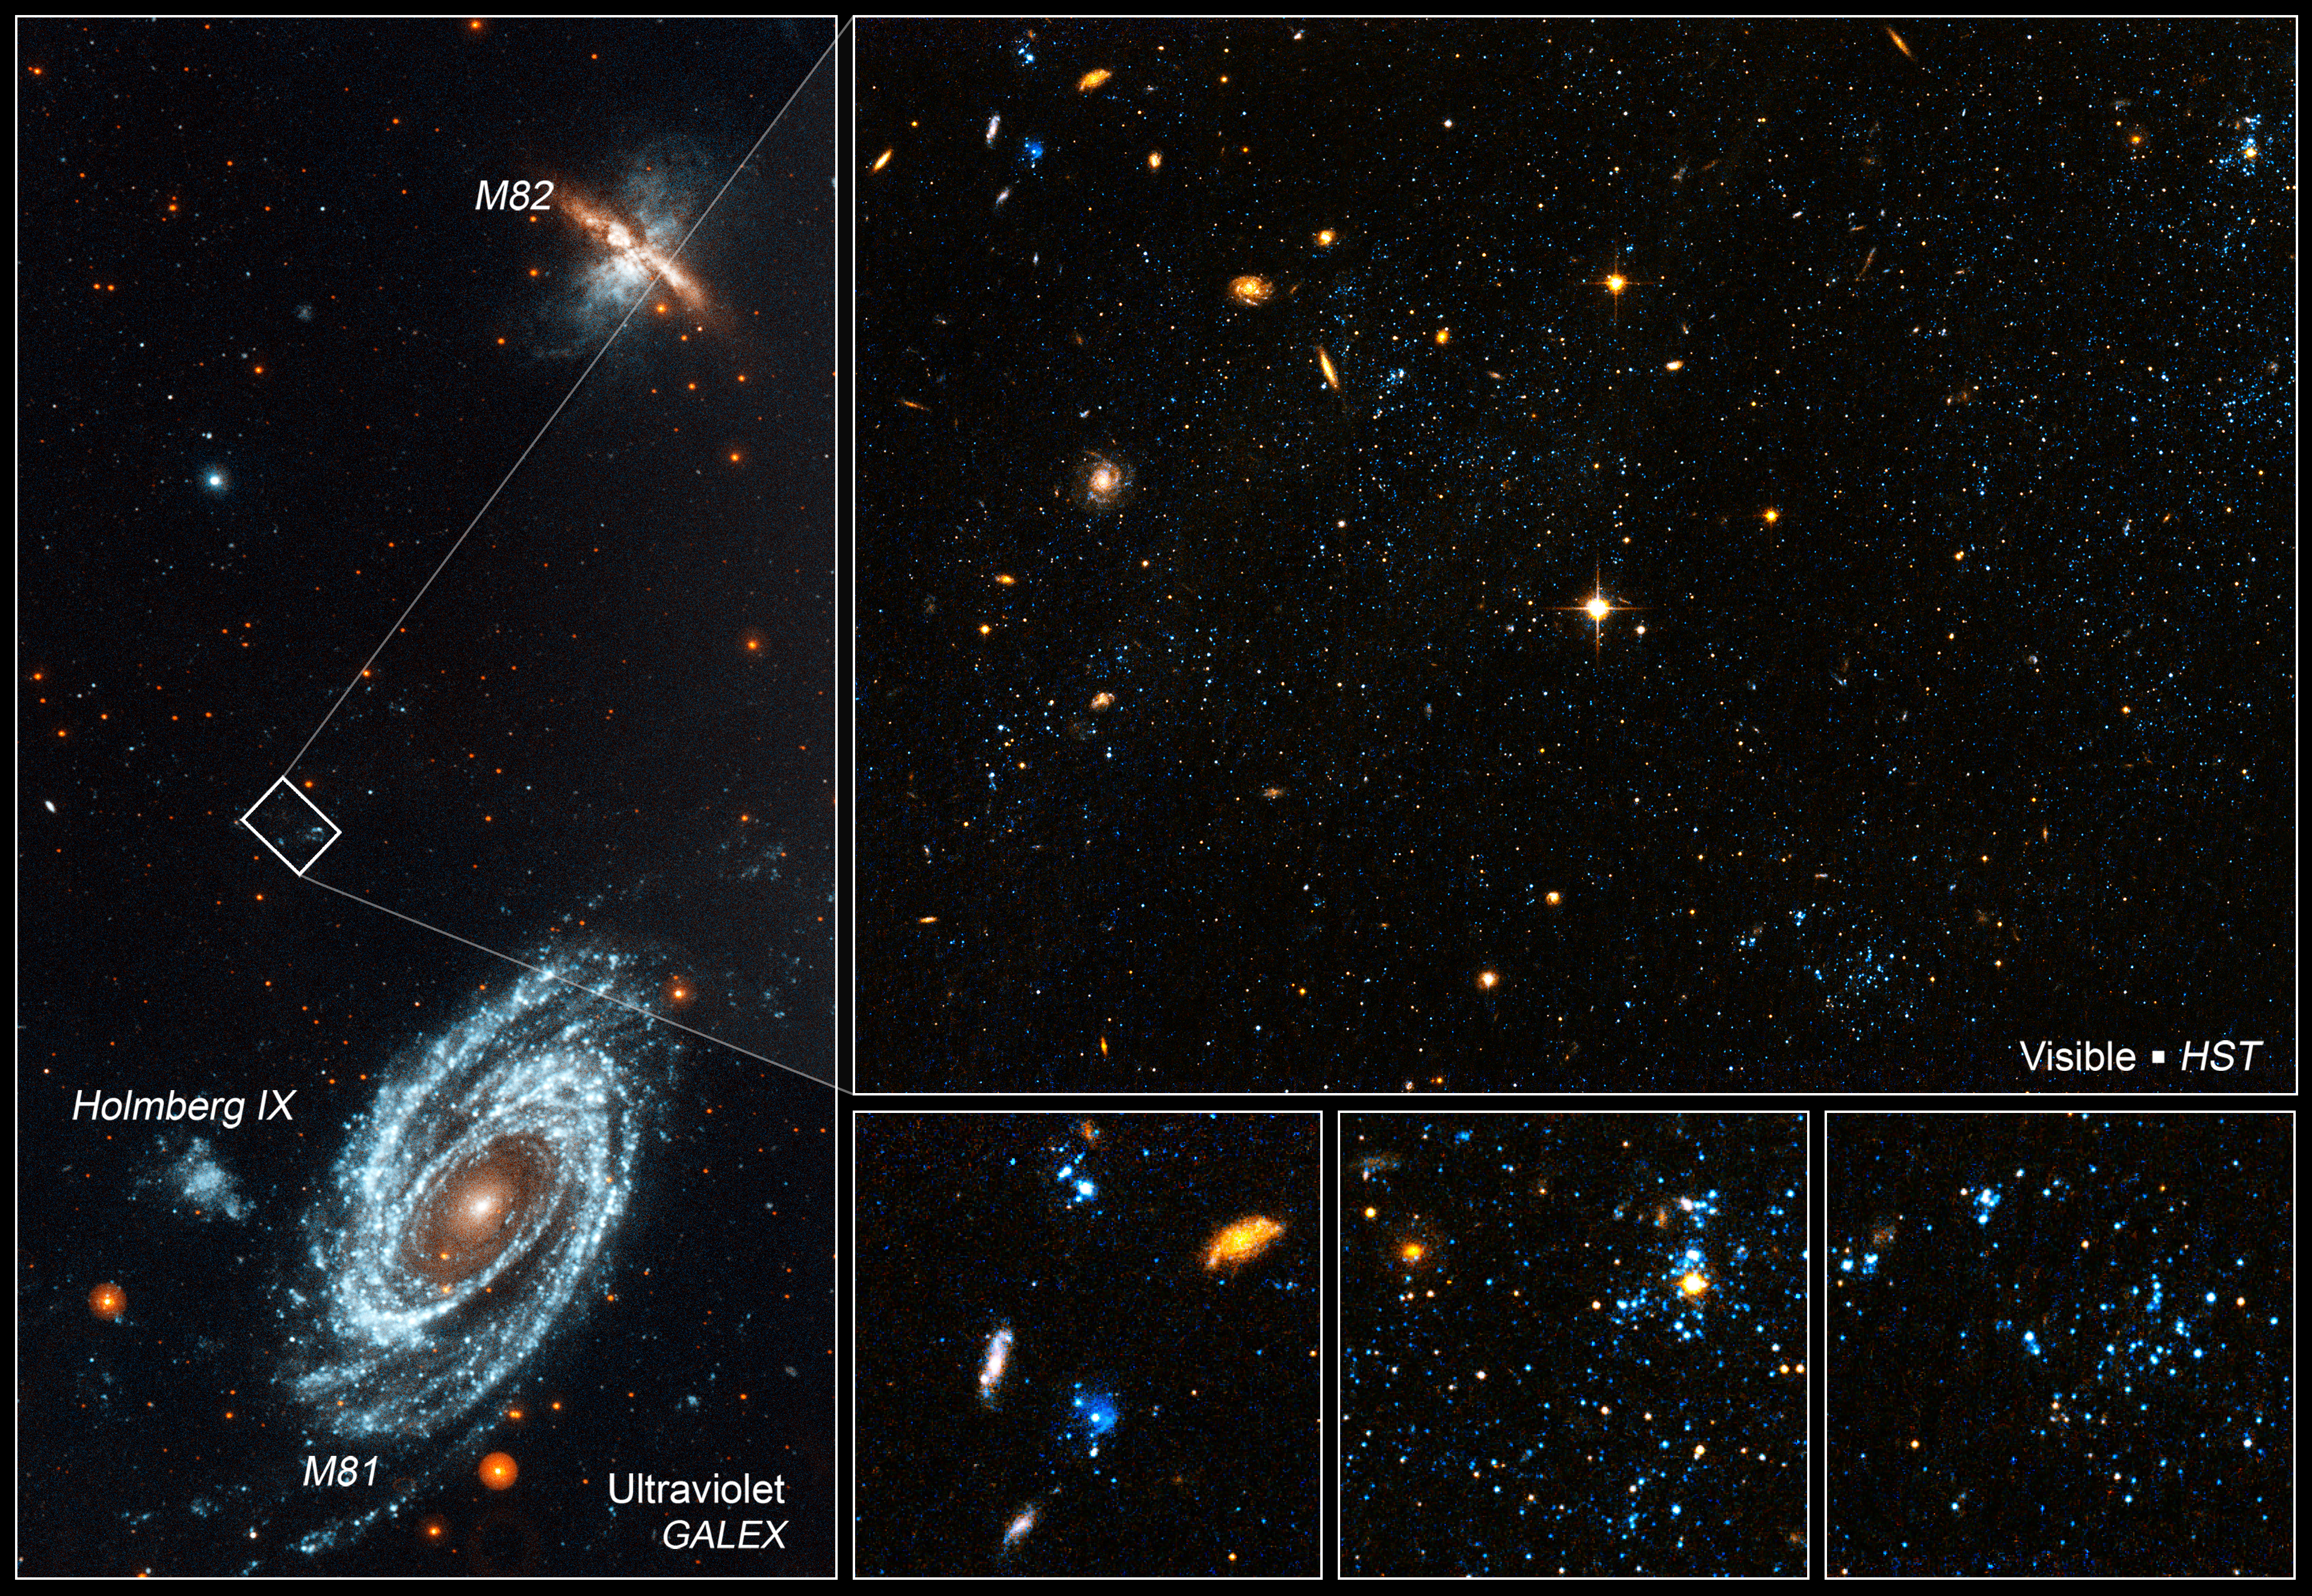

Location of the blue blobs in galaxy group

[LEFT]
A GALEX ultraviolet image of the interacting galaxies M81 and M82, which lie 12 million light-years away in the constellation Ursa Major. The gravity from each galaxy dramatically affected the other during their last close encounter, 200 million years ago. Gas density waves rippling around M81 make it a grand design spiral. M82 is undergoing a starburst at its core, creating glowing fingers of hydrogen.

[RIGHT]
A Hubble Space Telescope visible light image of bright blue star clusters found along a wispy bridge of gas that was tidally stretched between the two galaxies, and a third companion galaxy not seen in this picture. This is not the place astronomers expect to find star clusters because the density of gas is so low. Turbulence in the gas may have enhanced the density locally to trigger starbirth. The so-called "blue blobs" are clumped together in a structure called Arp's Loop. Hubble reveals the clusters contain the equivalent of five Orion Nebulae. A Hubble plot of the stellar population in the clusters yields an age of approximately 200 million years, which coincides with the epoch of the collision.

Credit: NASA, ESA, and D. de Mello (Catholic University of America/GSFC)